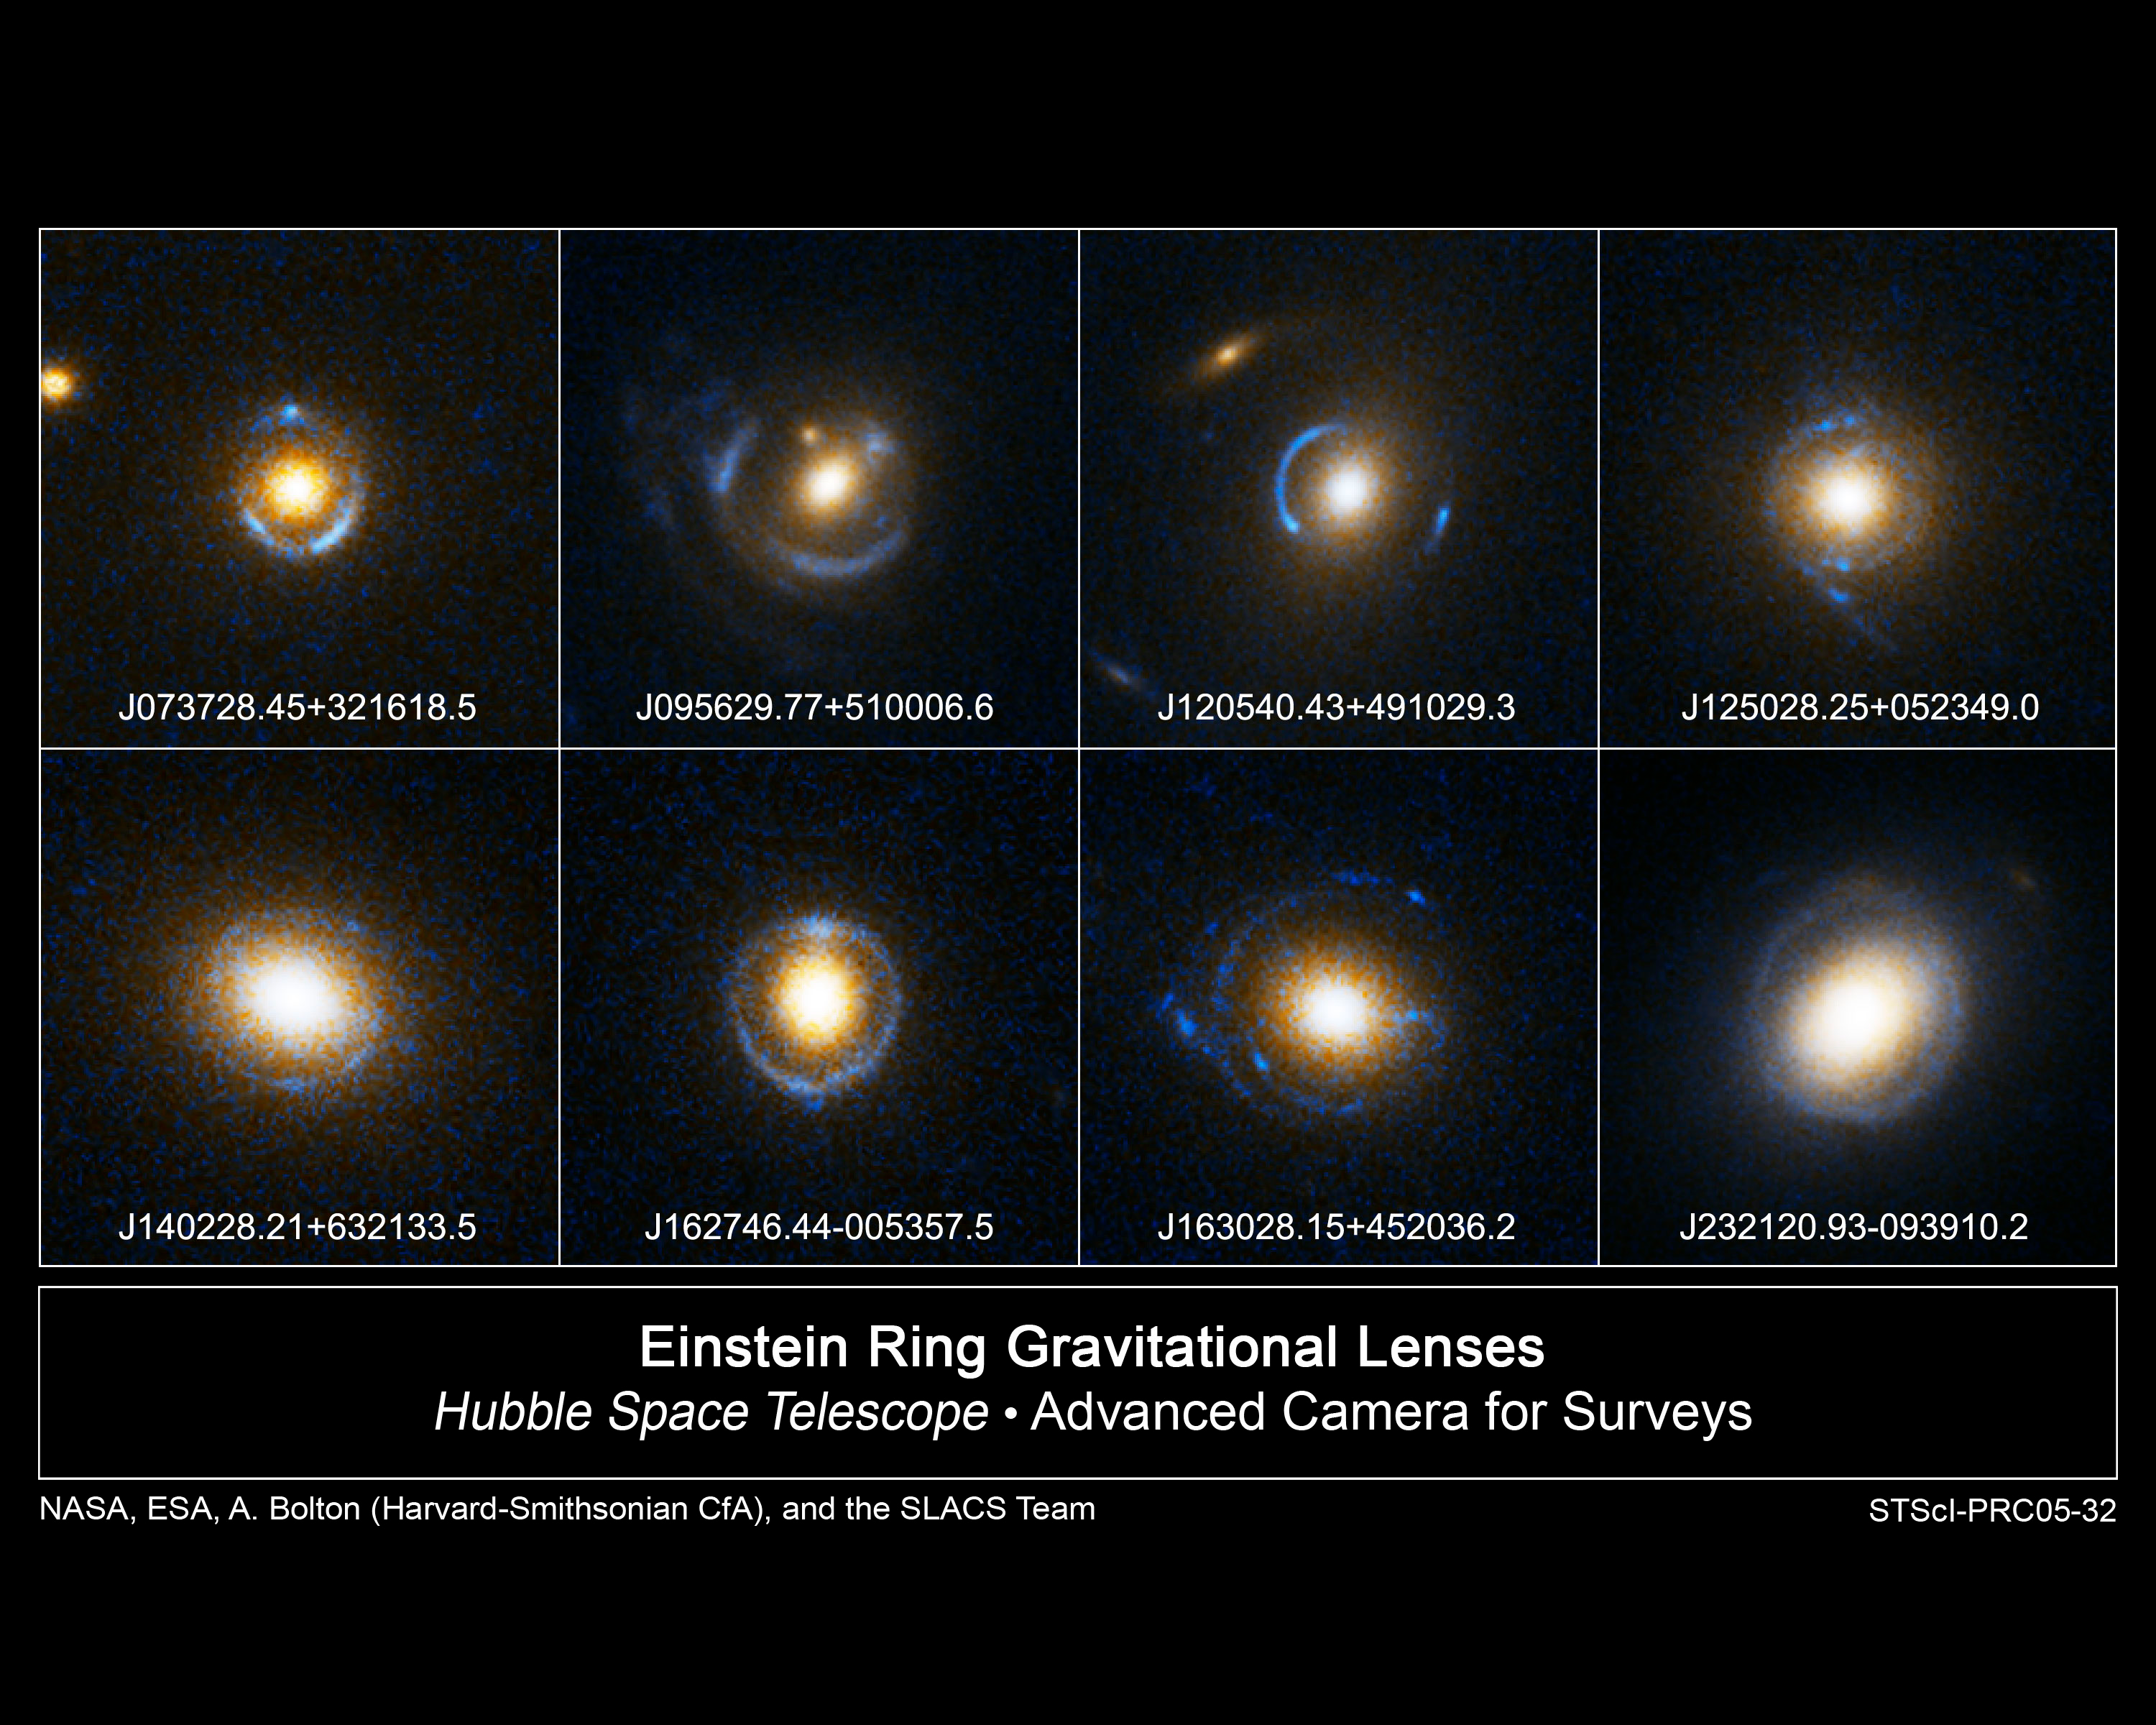

A gallery of Einstein rings

The thin blue bull's-eye patterns in these eight Hubble Space Telescope images appear like neon signs floating over reddish-white blobs. The blobs are giant elliptical galaxies roughly 2 to 4 billion light-years away. The bull's-eye patterns are created as the light from galaxies twice as far away is distorted into circular shapes by the gravity of the giant elliptical galaxies. This phenomenon is called Gravitational Lensing, first predicted by Albert Einstein almost a century ago. Gravitational Lensing occurs when the gravitational field from a massive object warps space and deflects light from a distant object behind it.

Credit: NASA, ESA, and the SLACS Survey team: A. Bolton (Harvard/ Smithsonian), S. Burles (MIT), L. Koopmans (Kapteyn), T. Treu (UCSB), and L. Moustakas (JPL/Caltech)